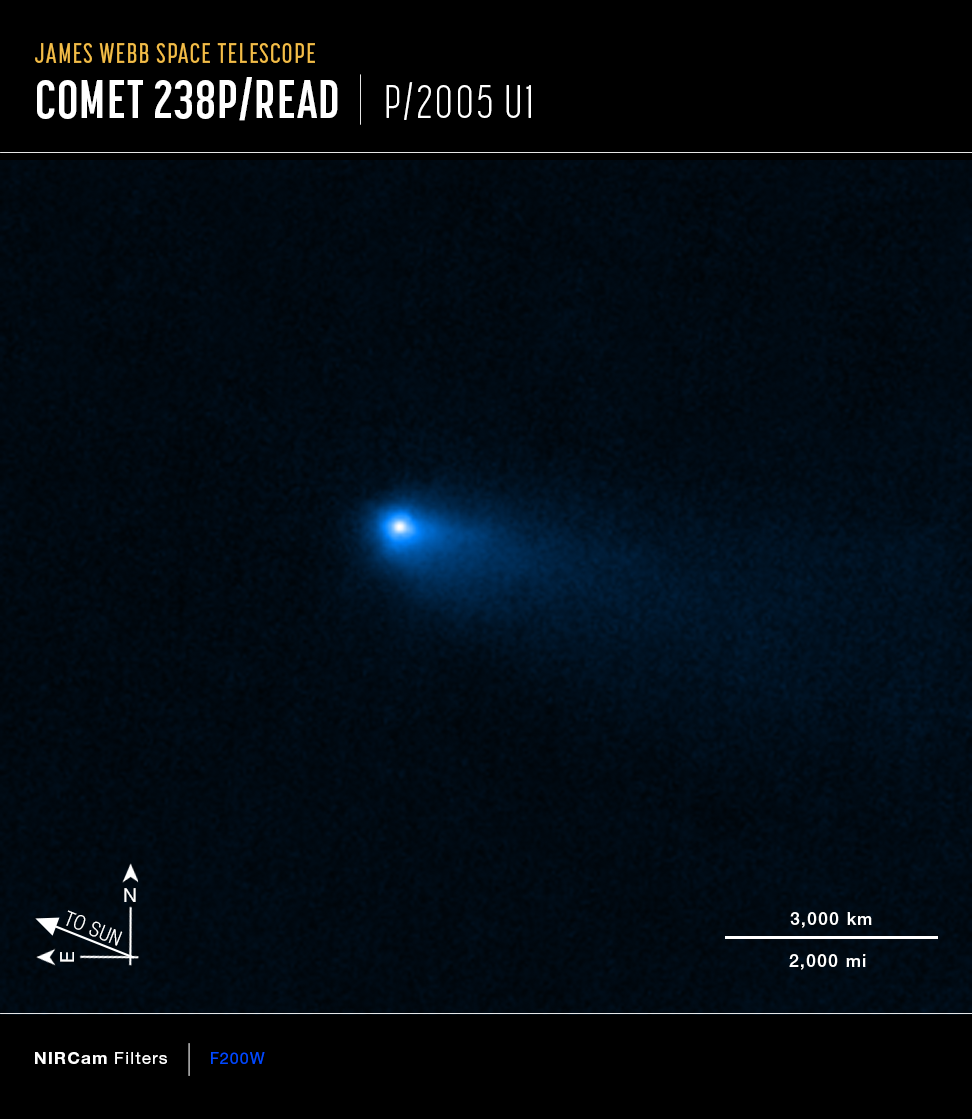

NIRCam image of Comet 238P/Read (annotated)

This image of Comet 238P/Read was captured by the NIRCam (Near-Infrared Camera) instrument on the NASA/ESA/CSA James Webb Space Telescope on 8 September 2022. It displays the hazy halo, called the coma, and tail that are characteristic of comets, as opposed to asteroids. The dusty coma and tail result from the vapourisation of ices as the Sun warms the main body of the comet.

Credit: NASA, ESA, CSA, M. Kelley (University of Maryland), H. Hsieh (Planetary Science Institute), A. Pagan (STScI)